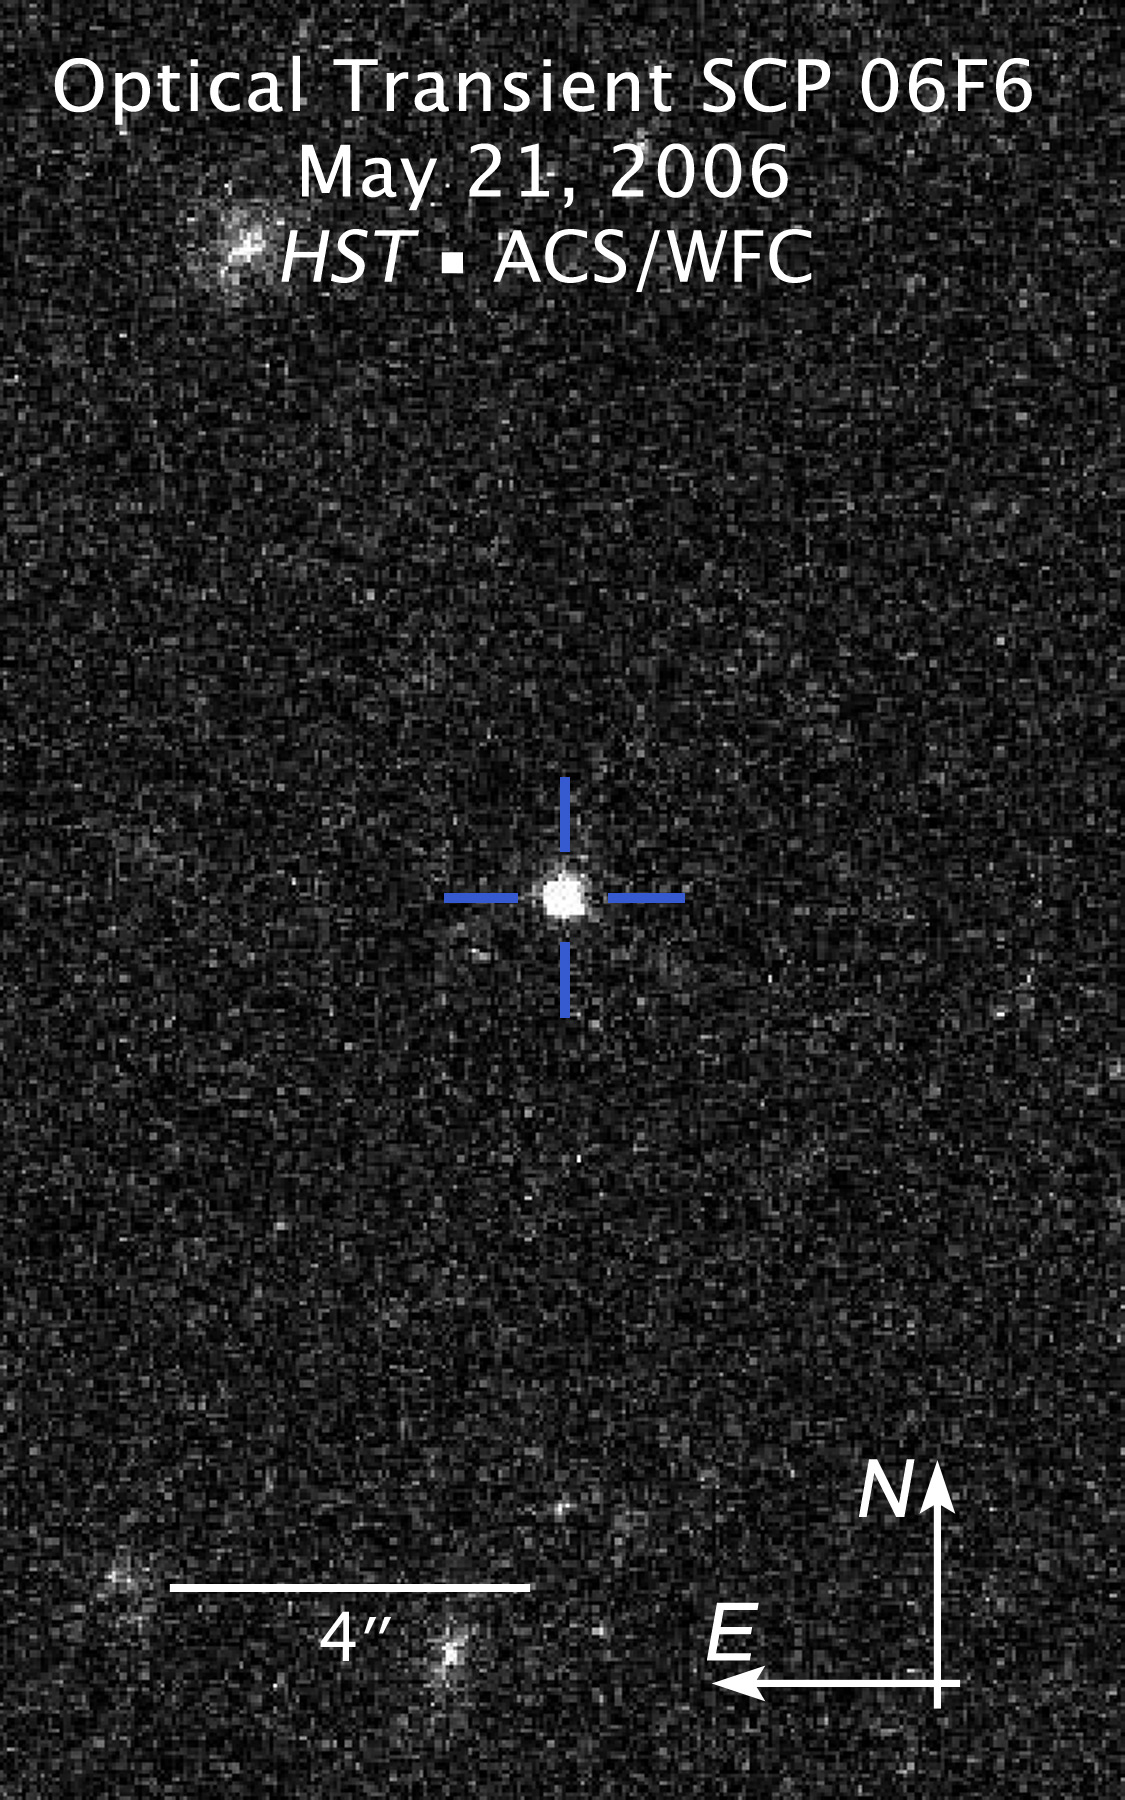

Compass and scale file of Optical Transient SCP 06F6

In 2006 the ESO/NASA Hubble Space Telescope observed an object, which brightend over a period of 100 days and then faded over a similar period. The spectrum of the light from the object did not fit any known supernova types. Even worse, astronomers were not able to trace back the few spectral lines in the light of the object to any known elements which made it impossible to determine the distance of the object. In addition neither a star of the Milky Way nor another galaxy was found at the location of the object.

The picture presented here was taken on May 21, 2006, during the period the object was still brightening up.

Astronomers came up with several explanations for the nature of SC 06F6: It was suggested that SCP 06F6 might be a supernova at an extreme distance. It would also be possible that Hubble observed the collision between an asteroid and a white star, or the collision of a white star and a black hole. Other ideas included the core collapse of a carbon star, a pair-instability supernova or even a complete new kind of supernova. However, the true nature of SCP 06F6 so far stays a mystery.

Credit: NASA, ESA and K. Barbary (University of California, Berkeley)